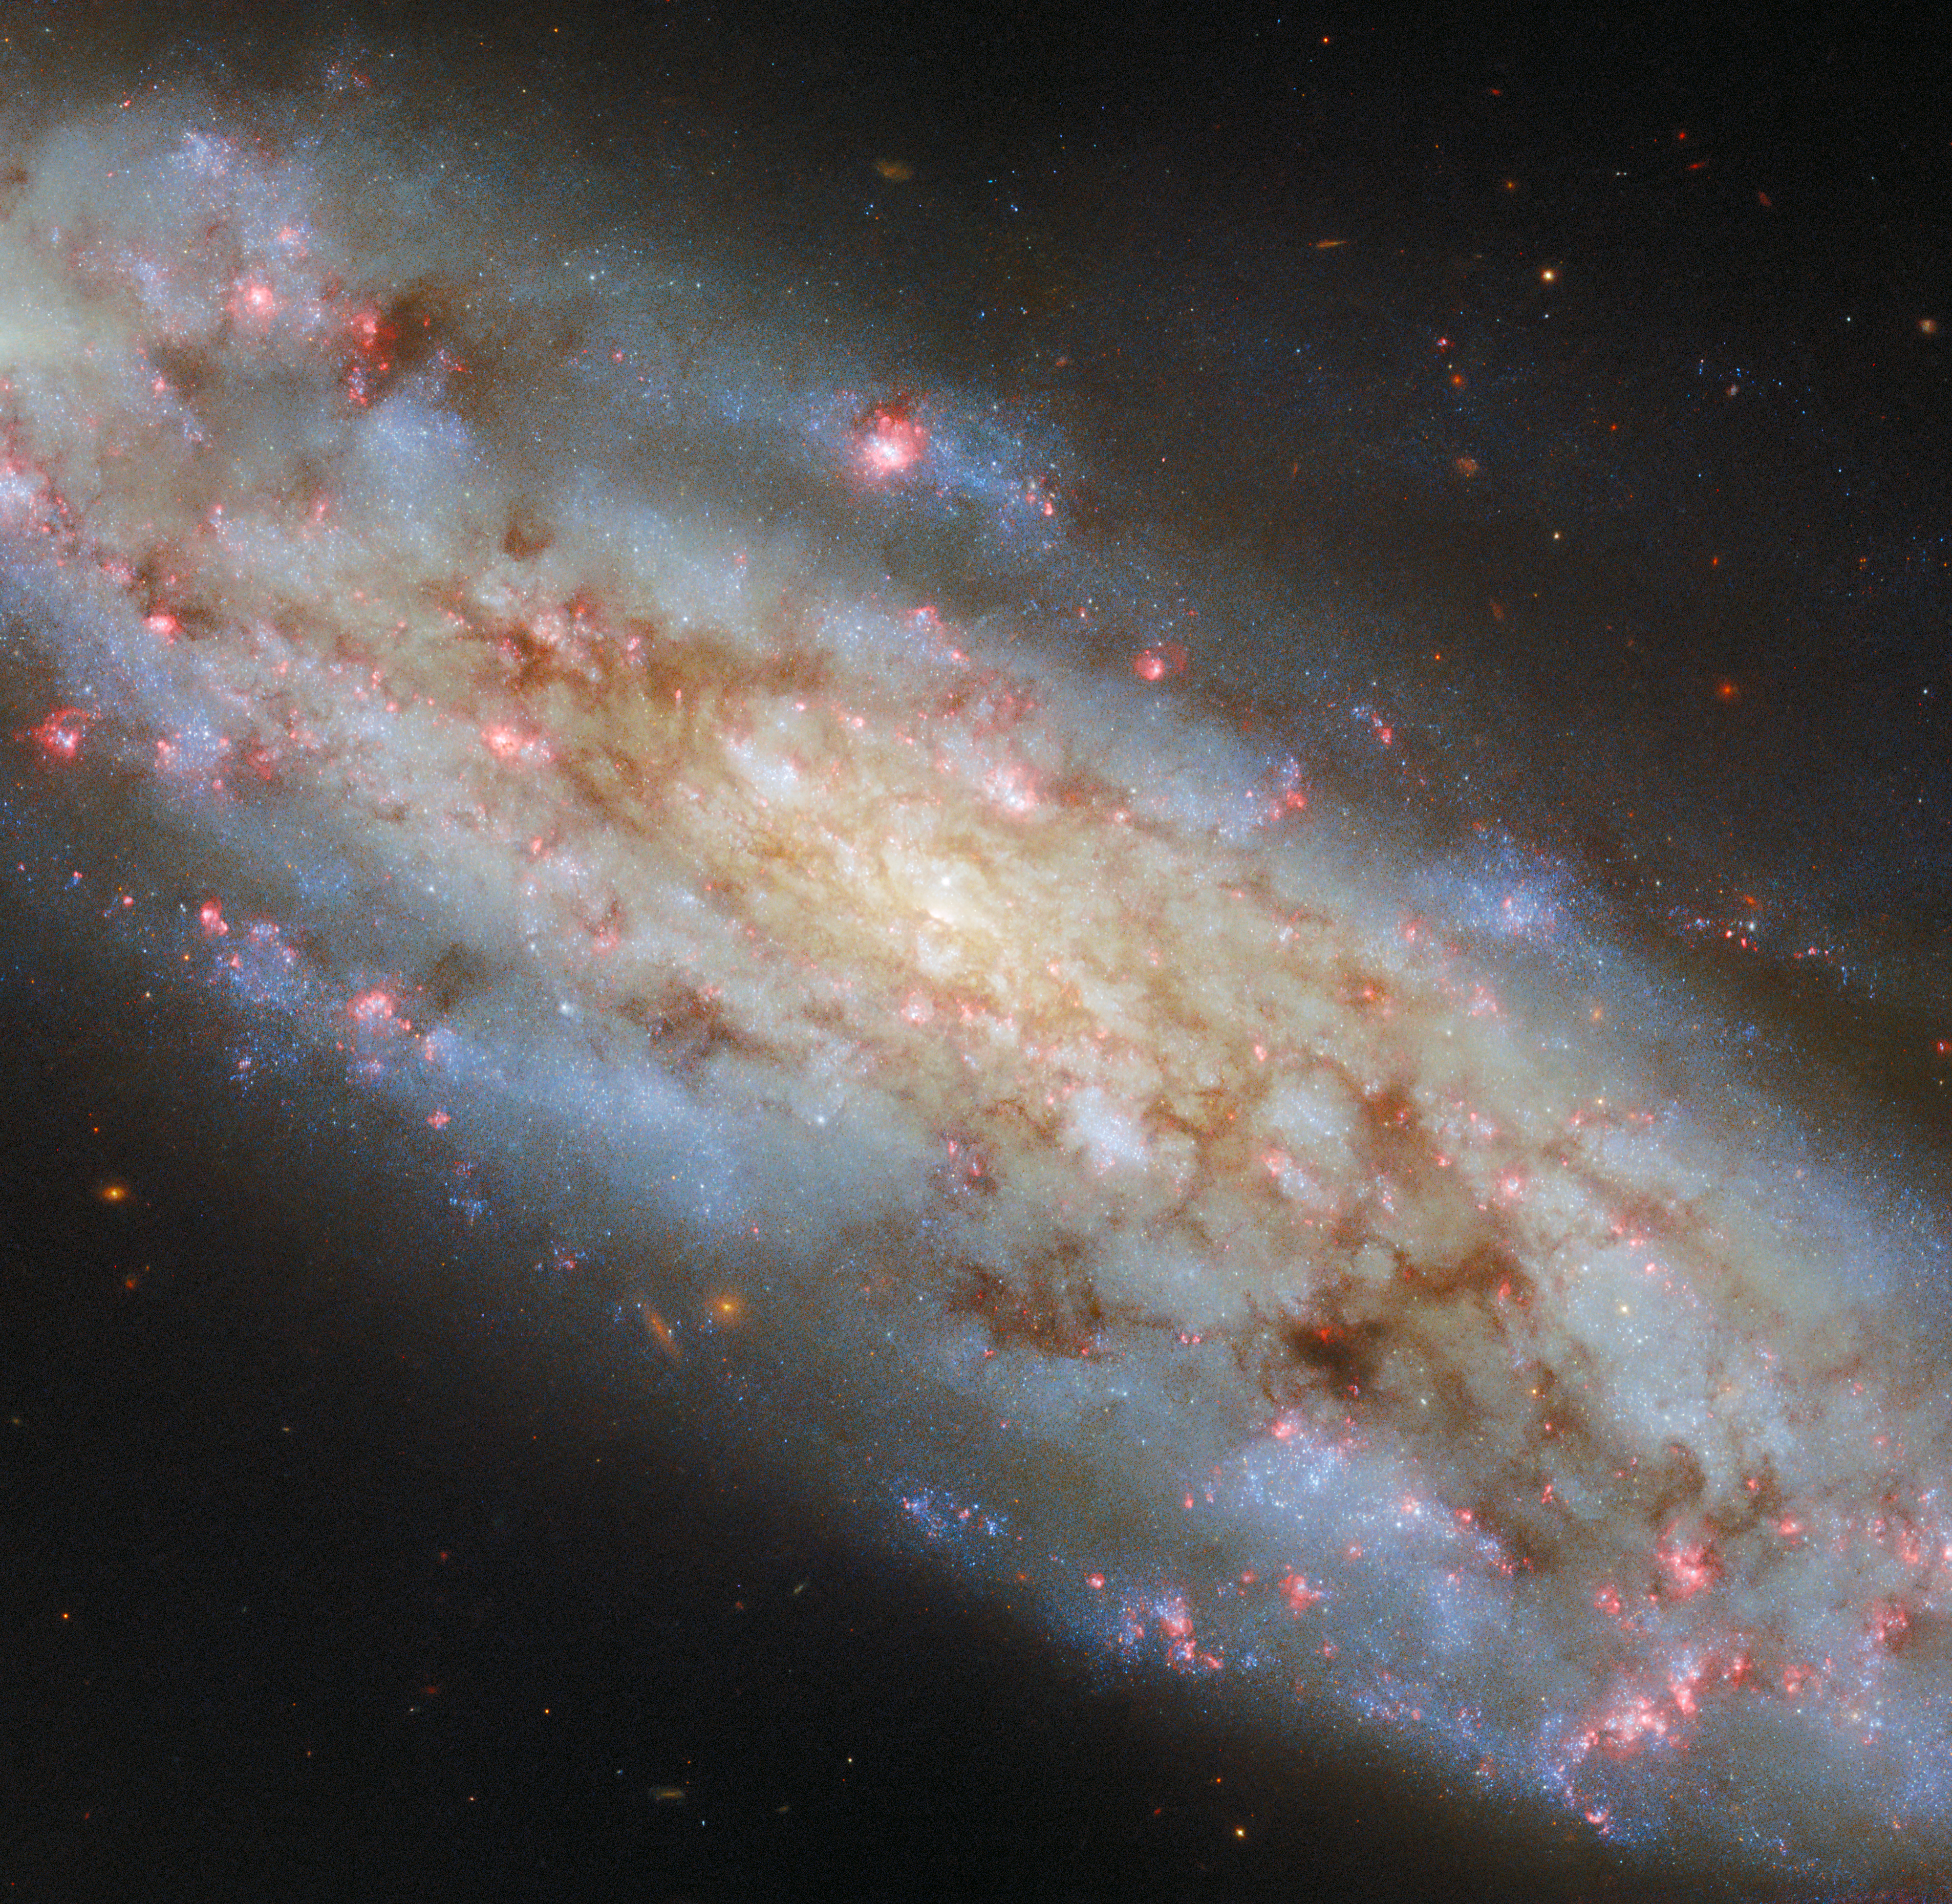

A spiral so inclined

The stately and inclined spiral galaxy NGC 3511 is the subject of this NASA/ESA Hubble Space Telescope Picture of the Week. The galaxy is located 43 million light-years away in the constellation Crater (The Cup). From Hubble’s vantage point in orbit around Earth, NGC 3511 is tilted by about 70 degrees, intermediate between face-on galaxies that display picture-perfect spiral arms and edge-on galaxies that reveal only their dense, flattened discs.

Astronomers are studying NGC 3511 as part of a survey of the star formation cycle in nearby galaxies. For this observing programme, Hubble will record the appearance of 55 local galaxies using five filters that allow in different wavelengths, or colours, of light.

One of these filters allows only a specific wavelength of red light to pass through. Giant clouds of hydrogen gas glow in this red colour when energised by ultraviolet light from hot young stars. As this image shows, NGC 3511 contains many of these bright red gas clouds, some of which are curled around clusters of brilliant blue stars. Hubble will help astronomers catalogue and measure the ages of these stars, which are typically less than a few million years old and several times more massive than the Sun.

Credit: ESA/Hubble & NASA, D. Thilker